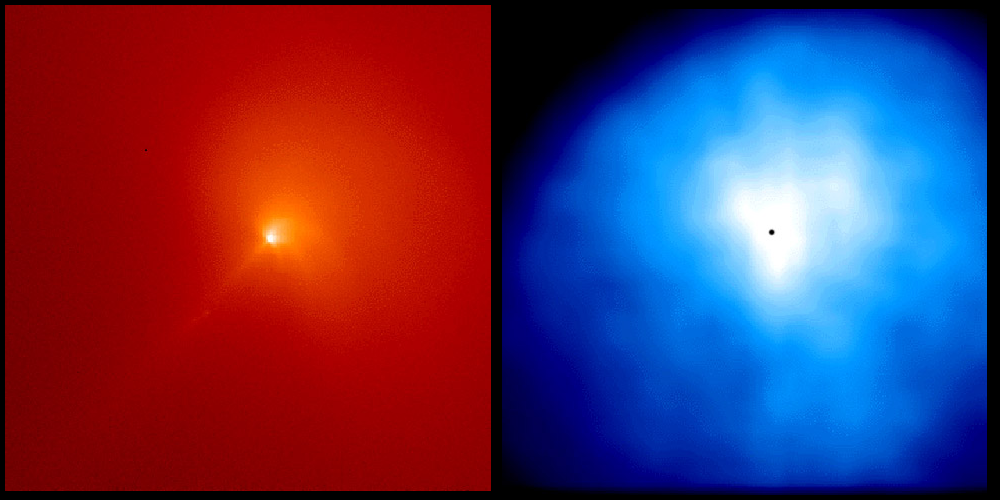

Comet Hyakutake - C/1996 B2

The left image, shown in red, was taken through a narrow-band red filter that shows only sunlight scattered by dust particles in the inner coma of the comet. The right image, shown in blue was taken with an ultraviolet 'Woods' filter image that shows the distribution of scattered ultraviolet radiation from hydrogen atoms in the inner coma.

Credit: M.R. Combi (The University of Michigan)